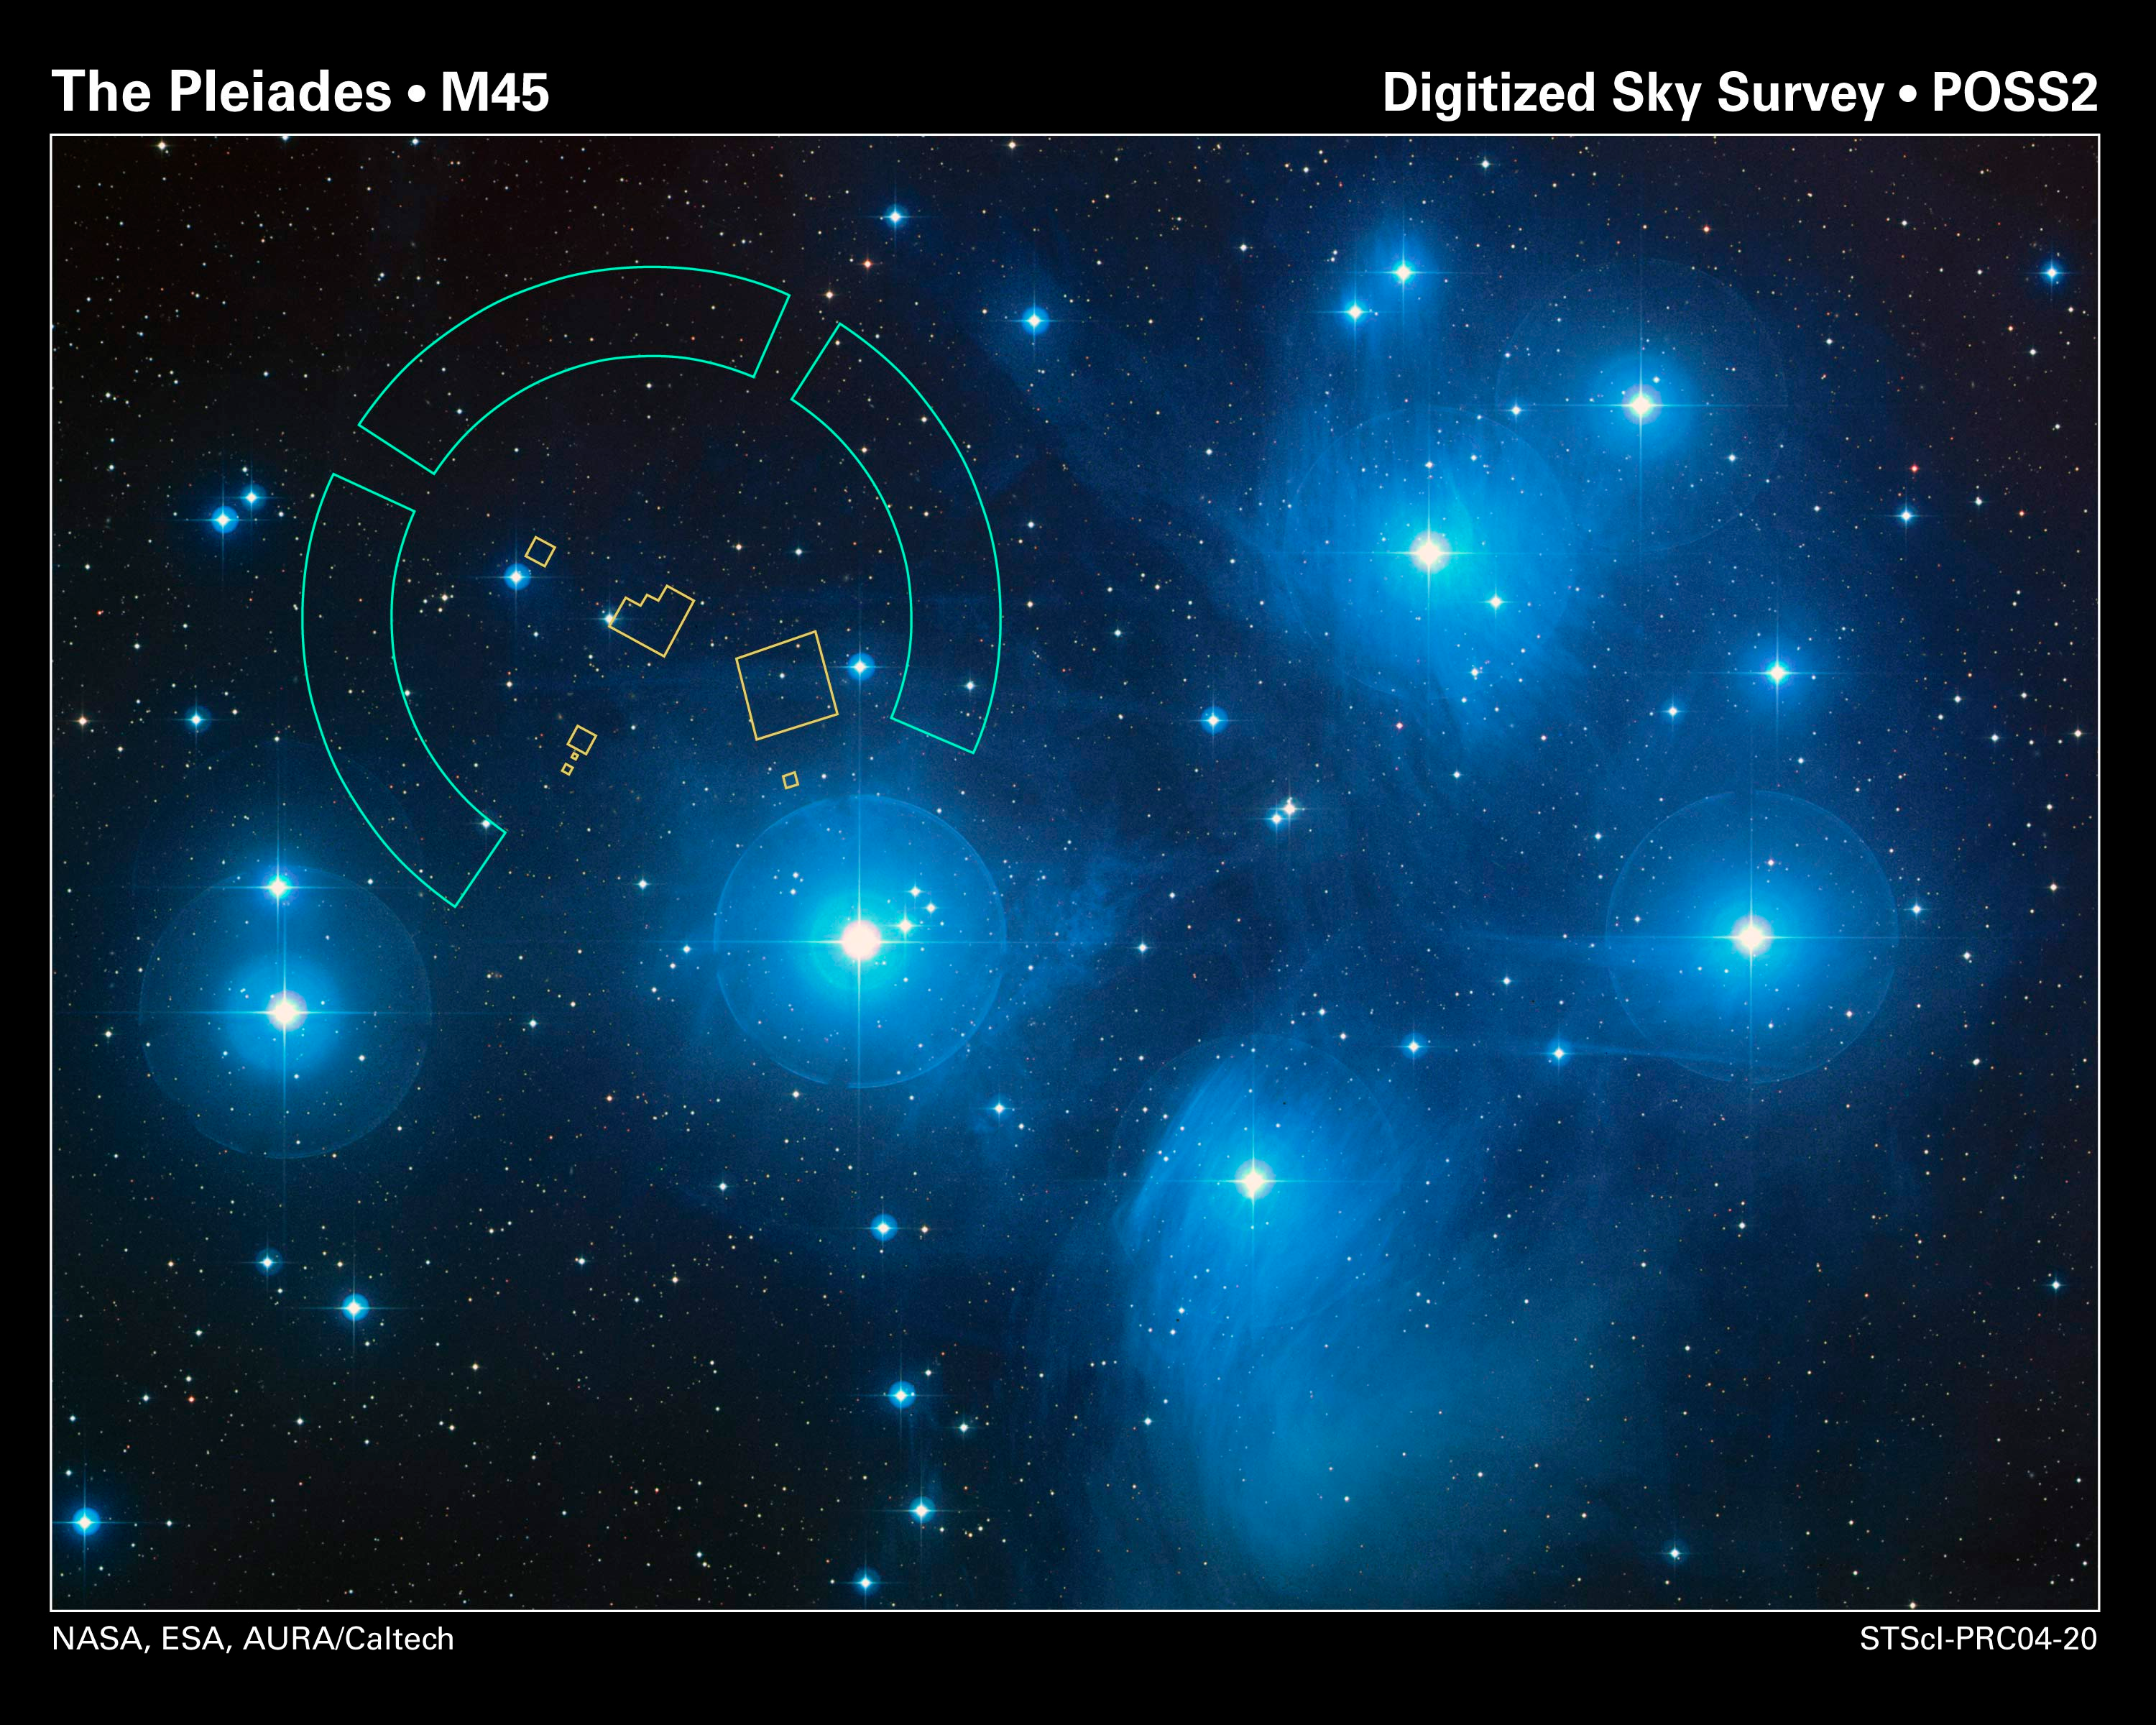

Hubble Refines Distance to the Pleiades Star Cluster

The brilliant stars seen in this image are members of the popular open star cluster known as the Pleiades, or Seven Sisters. The Hubble Space Telescope's Fine Guidance Sensors refined the distance to the Pleiades at about 440 light-years. The Fine Guidance Sensors are at the periphery of Hubble's field-of-view. They trace a circumference that is approximately the angular size of the Moon on the sky. They are overlaid on this image to give a scale to Hubble's very narrow view on the heavens.

Credit: NASA, ESA and AURA/Caltech